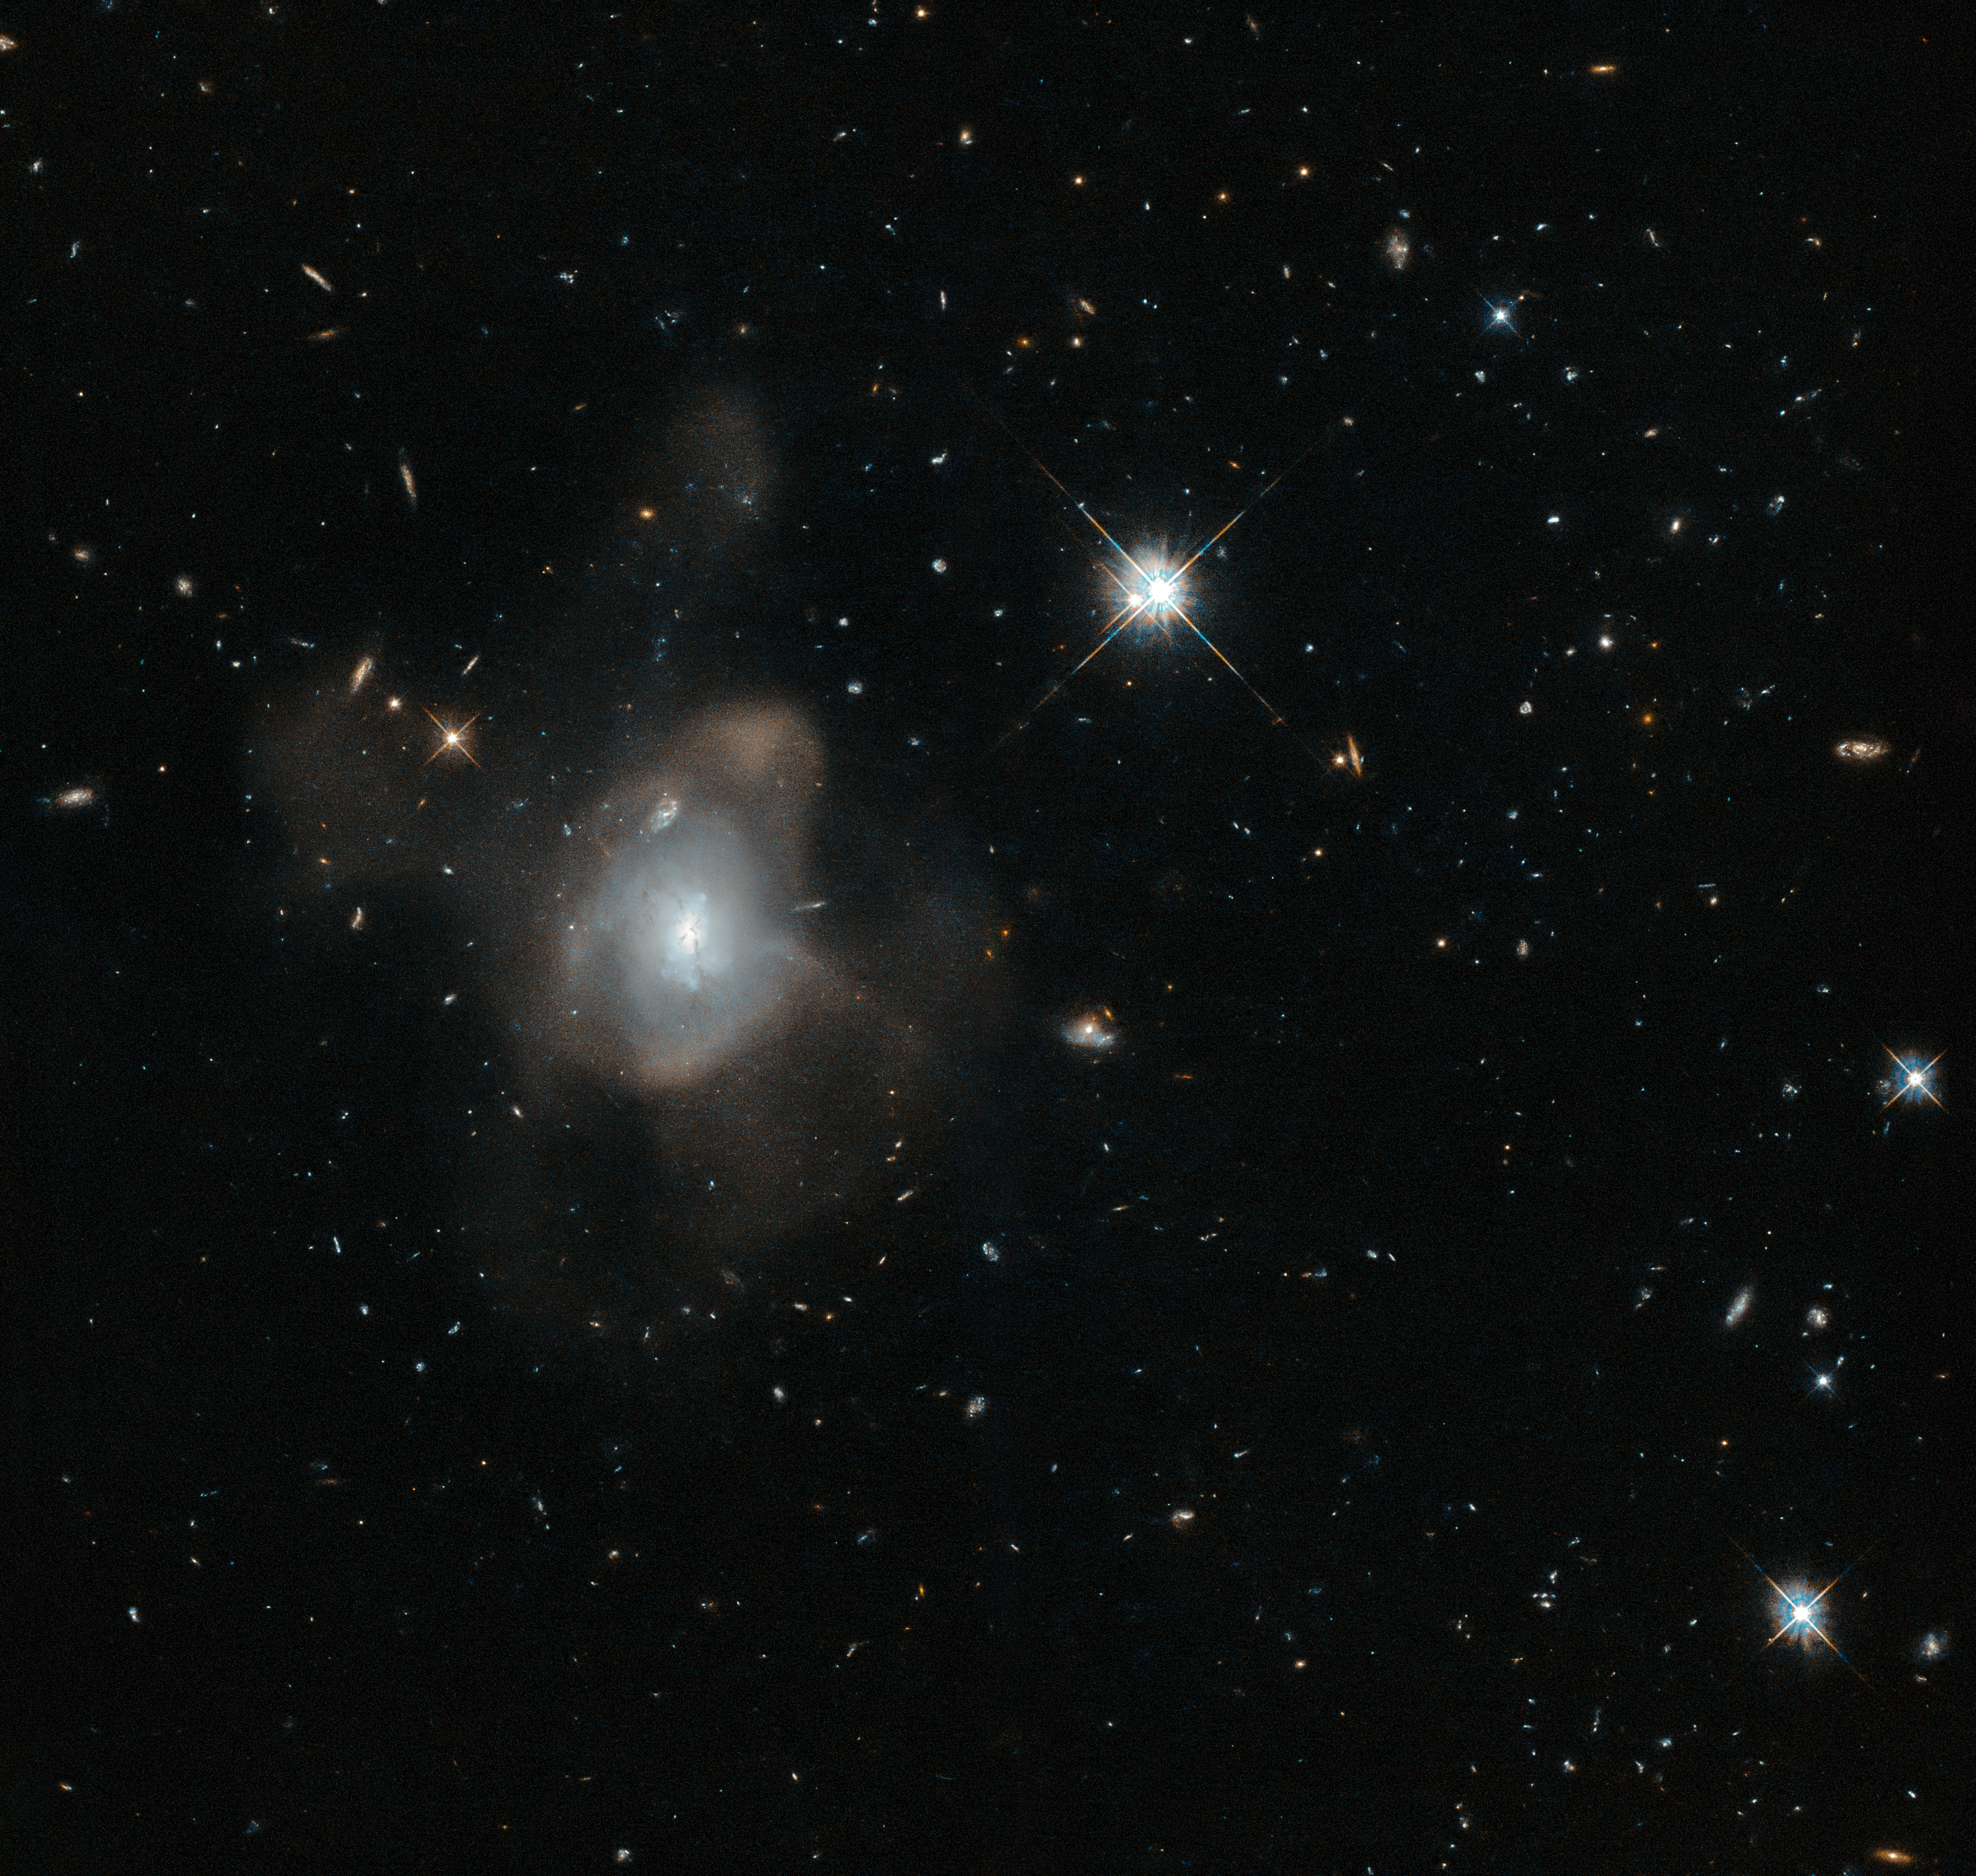

The last waltz

This curious galaxy — only known by the seemingly random jumble of letters and numbers 2MASX J16270254+4328340 — has been captured by the NASA/ESA Hubble Space Telescope dancing the crazed dance of a galactic merger. The galaxy has merged with another galaxy leaving a fine mist, made of millions of stars, spewing from it in long trails.

Despite the apparent chaos, this snapshot of the gravitational tango was captured towards the event’s conclusion. This transforming galaxy is heading into old age with its star-forming days coming to an end. The true drama occurred earlier in the process, when the various clouds of gas within the two galaxies were so disturbed by the event that they collapsed, triggering an eruption of star formation. This flurry of activity exhausted the vast majority of the galactic gas, leaving the galaxy sterile and unable to produce new stars.

As the violence continues to subside, the newly formed galaxy’s population of stars will redden with age and eventually begin drop off one by one. With no future generations of stars to take their place, the galaxy thus begins a steady descent towards death.

Credit: ESA/Hubble & NASA
Acknowledgement: Judy Schmidt (Geckzilla)